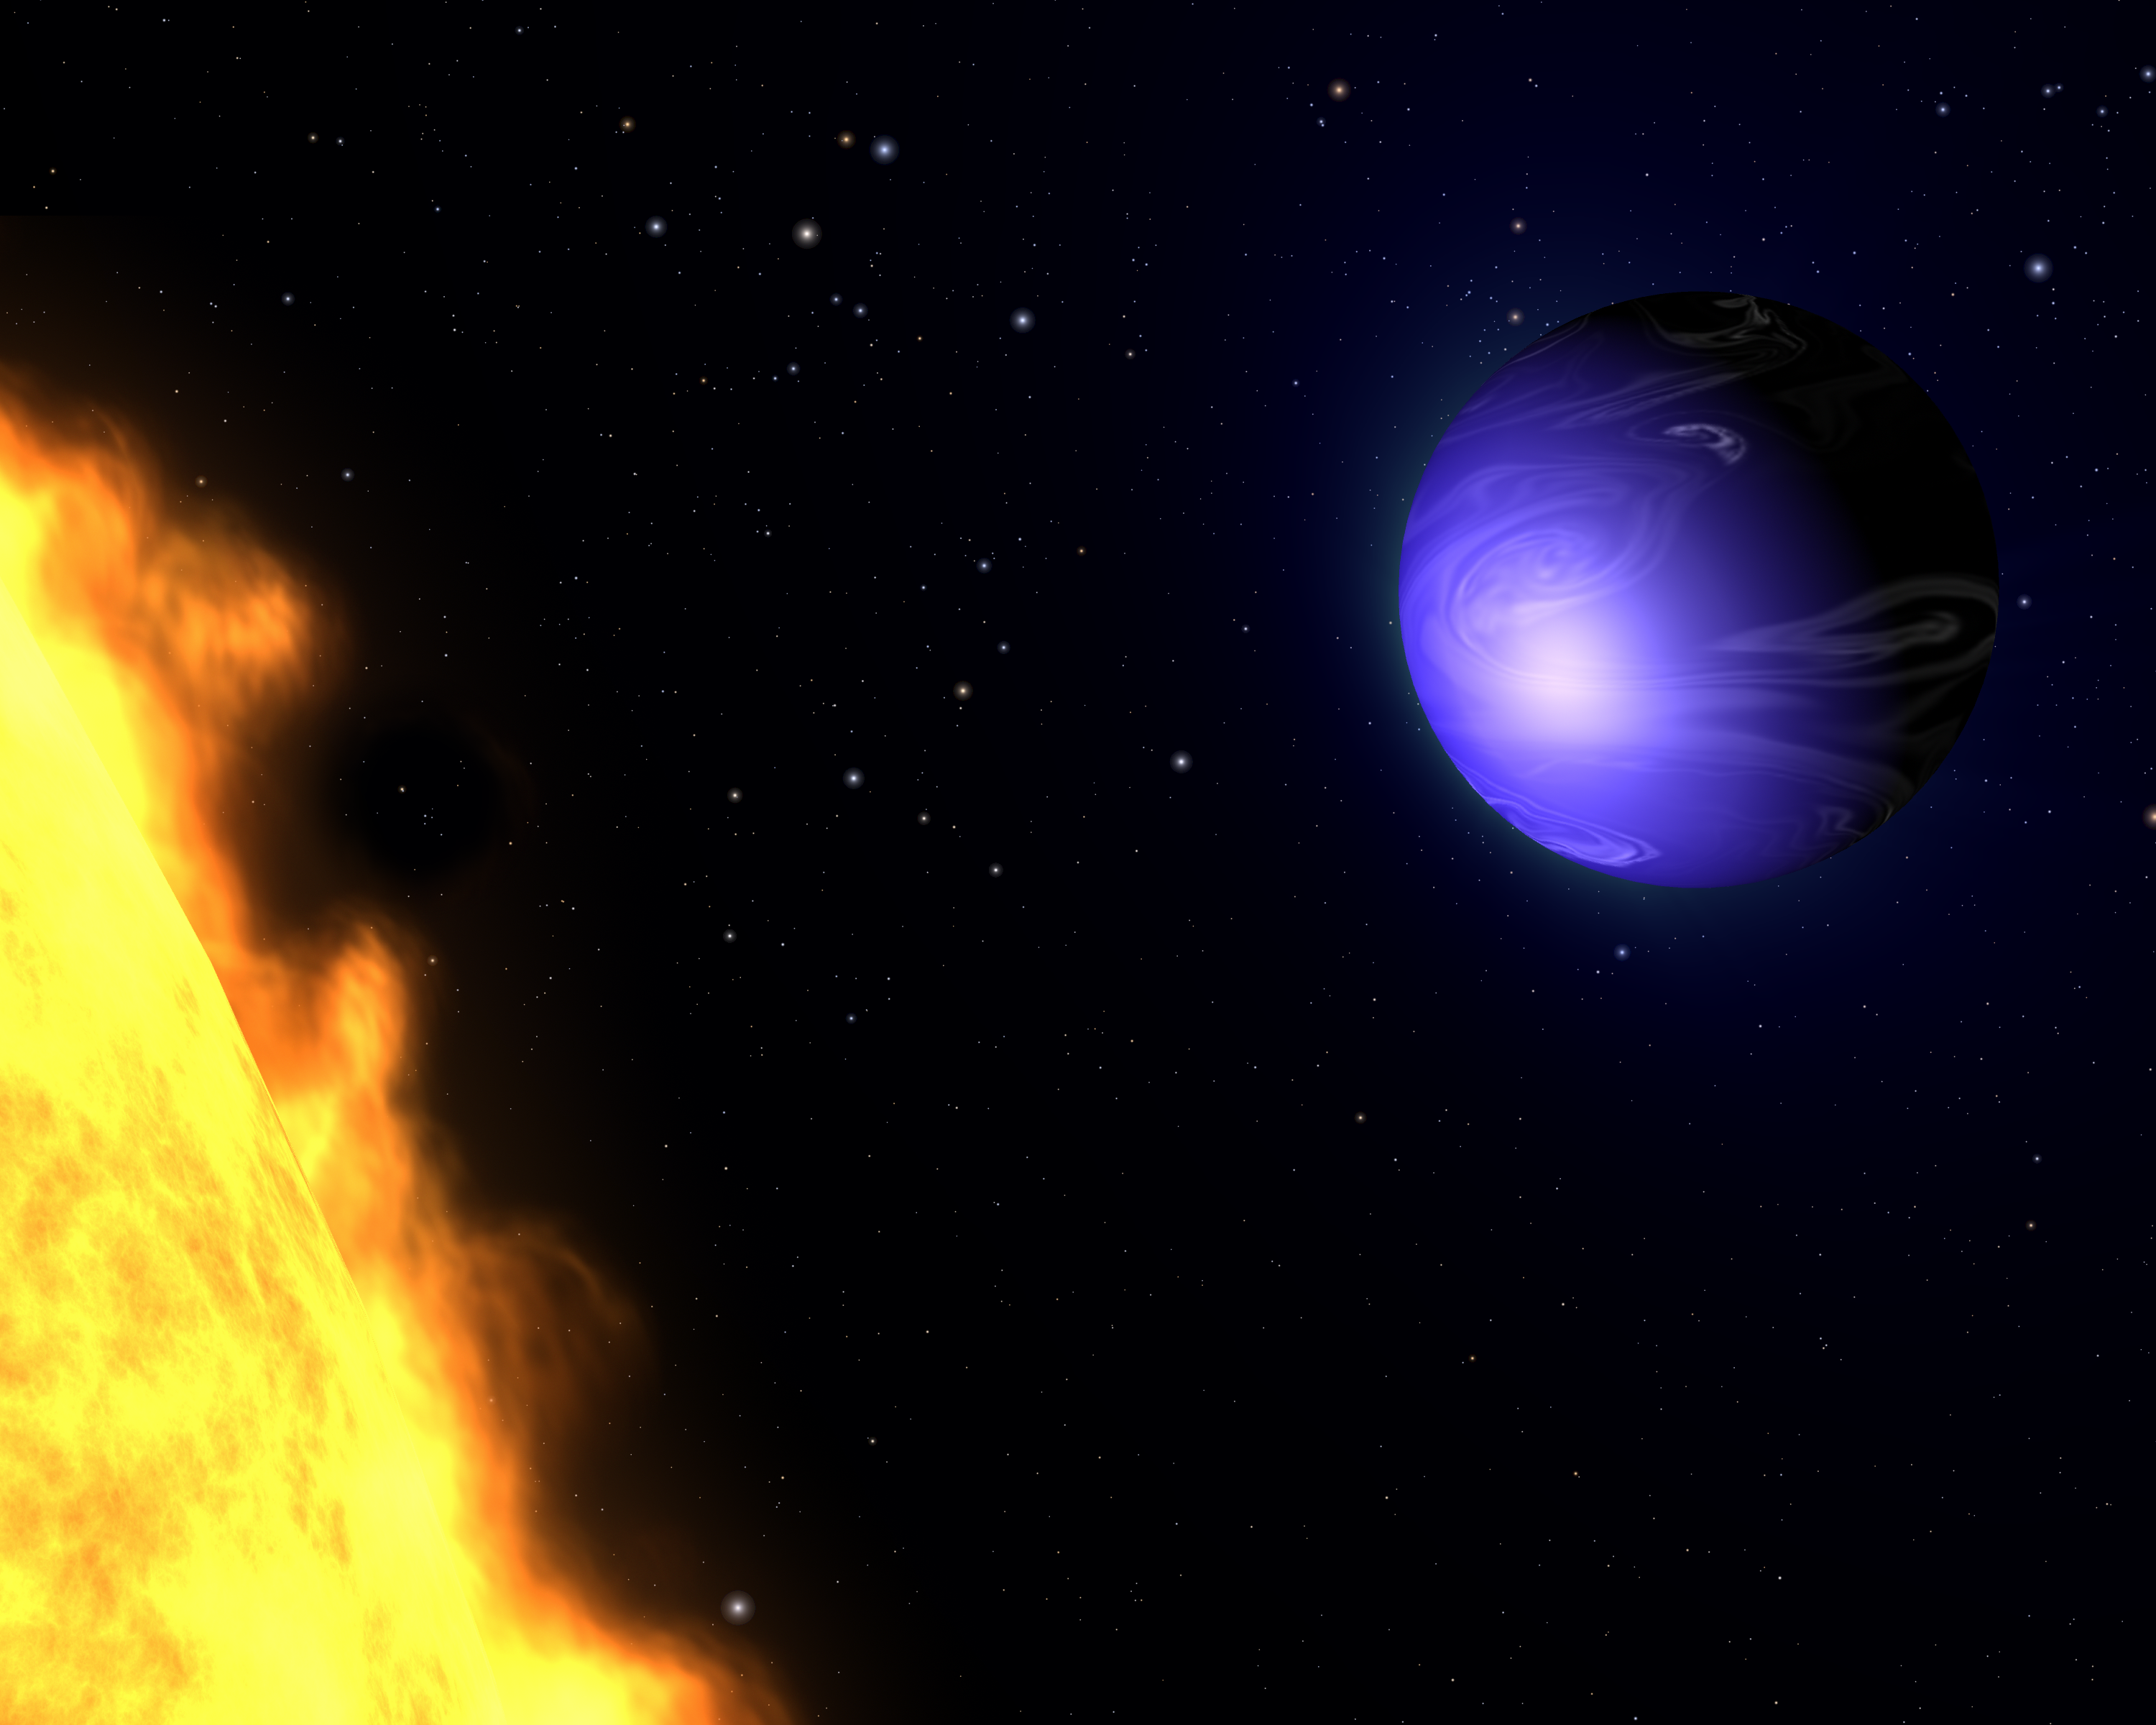

Exotic blue planet HD 189733b (artist’s impression)

This illustration shows a "hot Jupiter" planet known as HD 189733b orbiting its star, HD 189733. The NASA/ESA Hubble Space Telescope measured the actual visible light colour of the planet, which is deep blue. This colour is not due to the presence of oceans, but is caused by the effects of a scorching atmosphere where silicate particles melt to make "raindrops" of glass that scatter blue light more than red light.

The planet HD 189733b was discovered in 2005 and is so close to its star that it is gravitationally "tidally locked", so that one side always faces the star and the other side is always dark.

Because the planet is only 63 light-years from Earth, a visitor would see many of the same stars we see in our nighttime sky, though the constellation patterns would be different. Our Sun and the nearest star to our Sun, Alpha Centauri, appear as two faint stars near the centre of the image.

Credit: NASA, ESA, and G. Bacon (AURA/STScI)